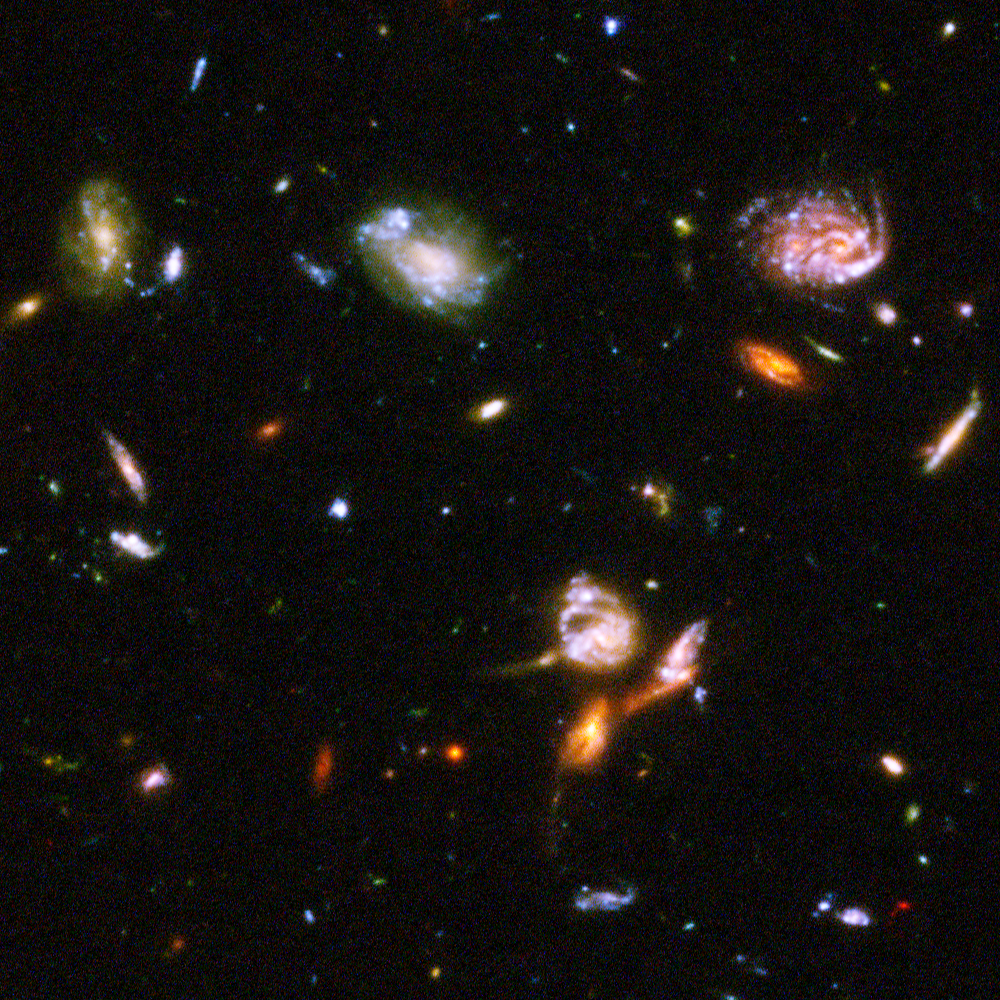

Hubble reveals galactic drama [image 1]

A galactic brawl. A close encounter with a spiral galaxy. Blue wisps of galaxies. These close-up snapshots of galaxies in the Hubble Ultra Deep Field reveal the drama of galactic life. Here three galaxies just below centre are enmeshed in battle, their shapes distorted by the brutal encounter.

The galaxies in this panel were plucked from a harvest of nearly 10,000 galaxies in the Ultra Deep Field, the deepest visible-light image of the cosmos.

The Ultra Deep Field observations, taken by the Advanced Camera for Surveys, represent a narrow, "deep" view of the cosmos. Peering into the Ultra Deep Field is like looking through a 2.5 metre-long soda straw.

In ground-based images, the patch of sky in which the galaxies reside (just one-tenth the diameter of the full Moon) is largely empty. Located in the constellation Fornax, the region is so empty, in fact, that only a handful of stars within the Milky Way galaxy can be seen in the image.

In this image, blue and green correspond to colours that can be seen by the human eye, such as hot, young, blue stars and the glow of Sun-like stars in the disks of galaxies. Red represents near-infrared light, which is invisible to the human eye, such as the red glow of dust-enshrouded galaxies.

The image required 800 exposures taken over the course of 400 Hubble orbits around Earth. The total amount of exposure time was 11.3 days, taken between Sept. 24, 2003 and Jan. 16, 2004.

Credit: NASA, ESA, and S. Beckwith (STScI) and the HUDF Team